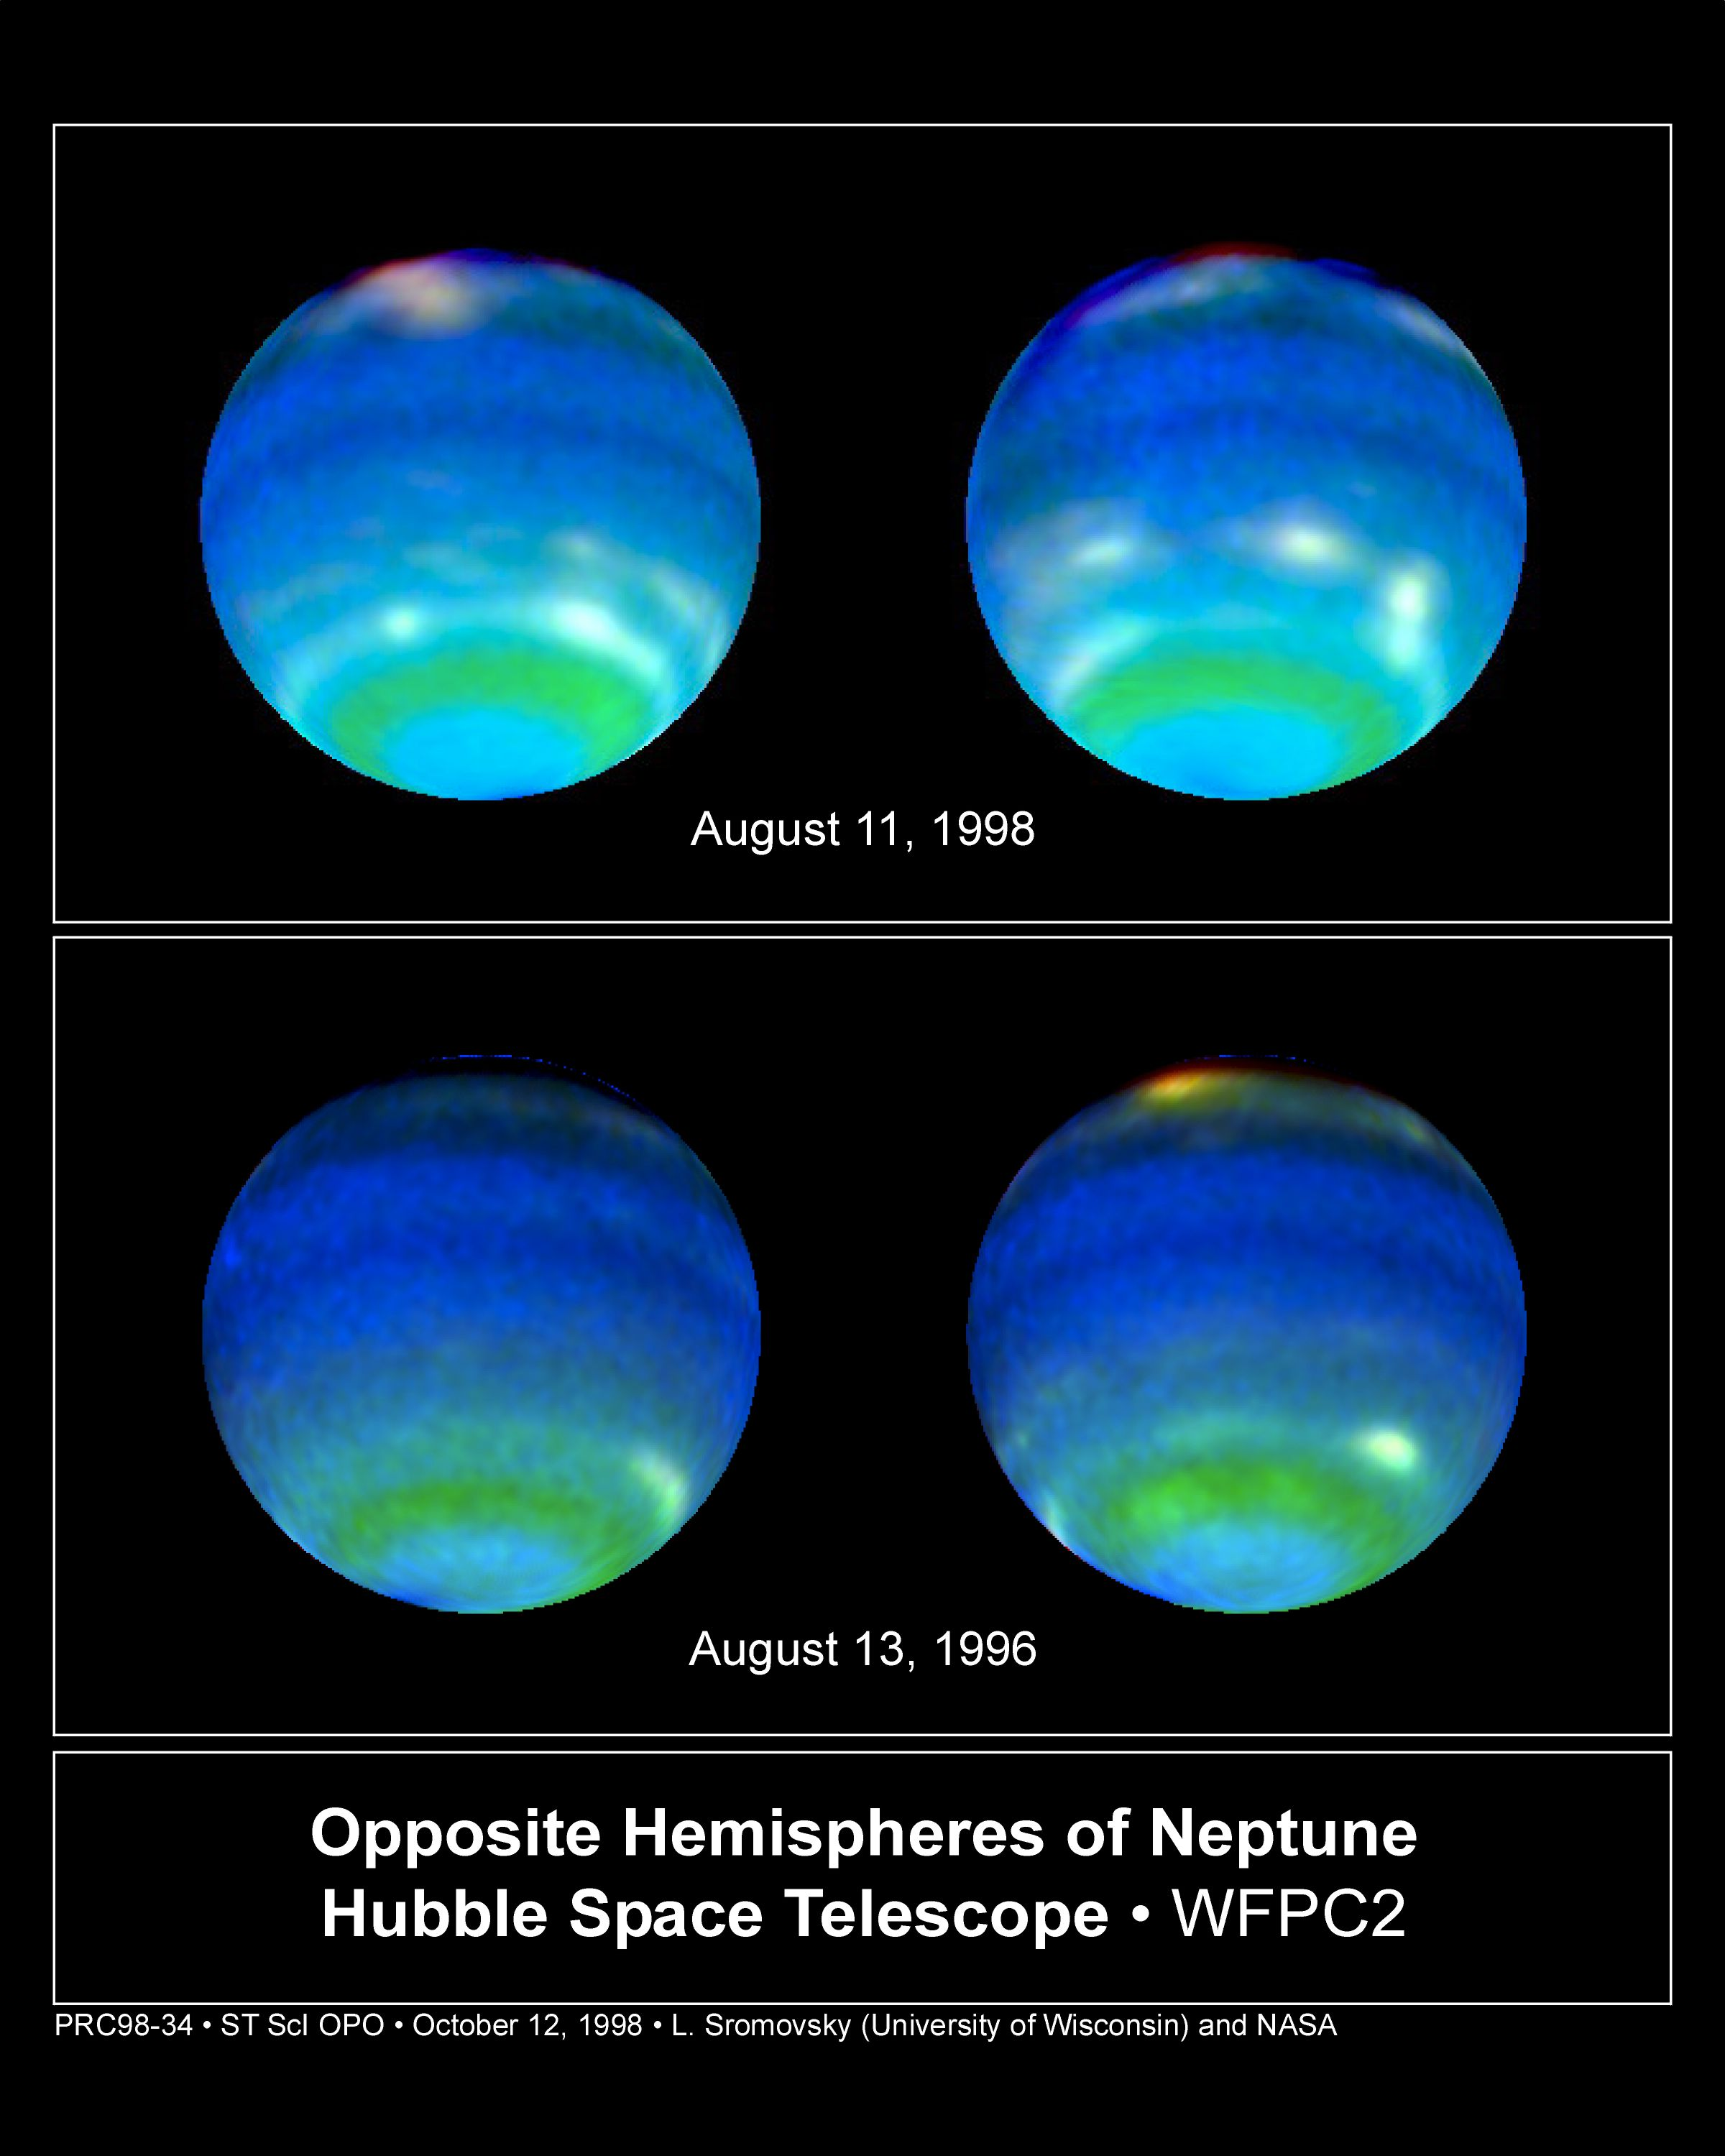

Opposite Hemispheres of Neptune

These views of Neptune, as seen through the Hubble Space Telescope, are helping planetary scientists gain some insight into the weird and wild weather that is a hallmark of the eighth planet from the sun. On Neptune, winds blow at 900 miles per hour (approx. 1450 kilometres per hour) and huge storms -- some the size of Earth itself -- come and go with regularity. How, precisely, Neptune's weather is driven is a mystery since the sun, which drives the Earth's weather, is 900 times dimmer there than on Earth. The bottom images show Neptune's Hubble portrait circa 1996. The top images were taken this year and help illustrate the dynamic weather features that dominate the planet.

Credit: Lawrence A. Sromovsky (University of Wisconsin-Madison) and NASA/ESA